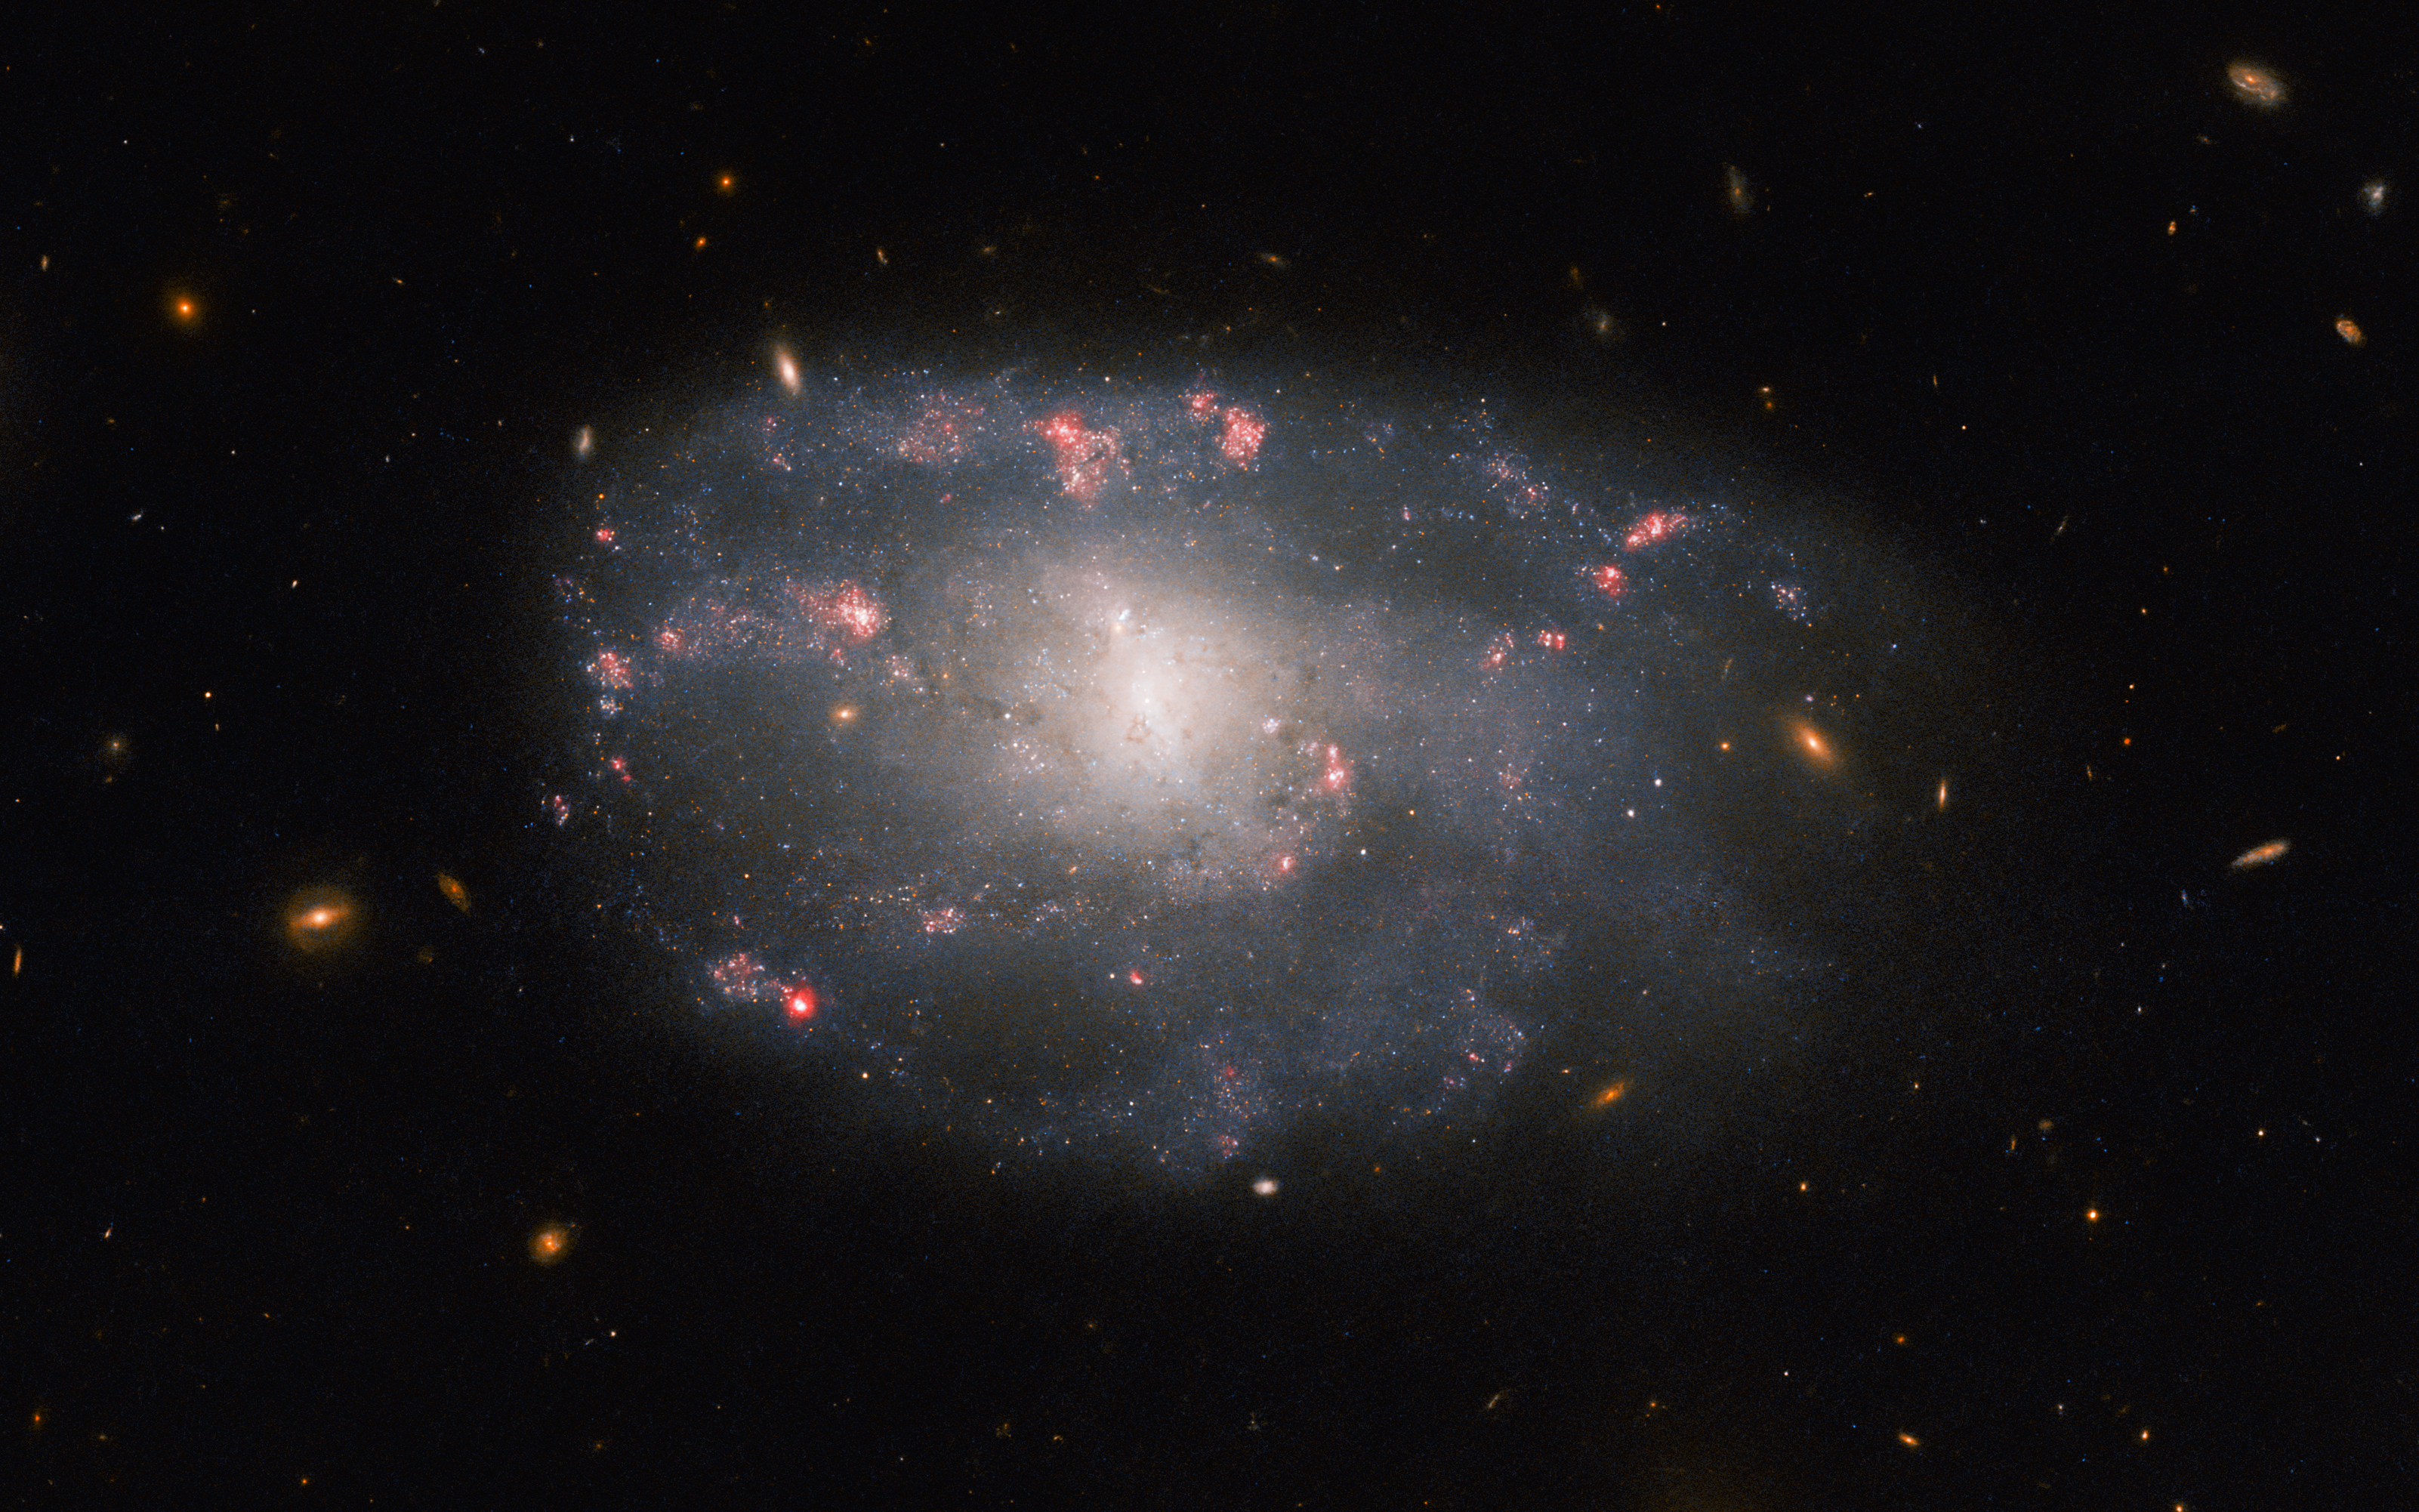

Hubble spies a meandering spiral

The irregular spiral galaxy NGC 5486 hangs against a background of dim, distant galaxies in this image from the NASA/ESA Hubble Space Telescope. The tenuous disc of the galaxy is threaded through with pink wisps of star formation, which stand out from the diffuse glow of the galaxy’s bright core. While this particular galaxy has indistinct, meandering spiral arms it lies close to the much larger Pinwheel Galaxy, one of the best known examples of ‘grand design’ spiral galaxies with prominent and well-defined spiral arms. In 2006 Hubble captured an image of the Pinwheel Galaxy which was — at the time — the largest and most detailed photo of a spiral galaxy ever taken with Hubble.

NGC 5486 lies 110 million light-years from Earth in the constellation Ursa Major. Constellations are not only patterns of bright stars, but also a system that astronomers use to divide the sky into regions. There are 88 of these regions, and each has an associated constellation depicting a mythological figure, an animal, or even an item of scientific equipment. This strange celestial menagerie contains everything from Ursa Major’s great bear to a toucan, a sea monster, a telescope, and even a painter's easel!

This observation comes from a selection of Hubble images exploring the detritus left behind by Type II supernovae. As massive stars reach the end of their lives they cast off huge amounts of gas and dust before ending their lives in titanic supernova explosions. NGC 5486 hosted a supernova in 2004, and astronomers used the keen vision of Hubble’s Advanced Camera for Surveys to explore the aftermath in the hopes of learning more about these explosive events.

Credit: ESA/Hubble & NASA, C. Kilpatrick